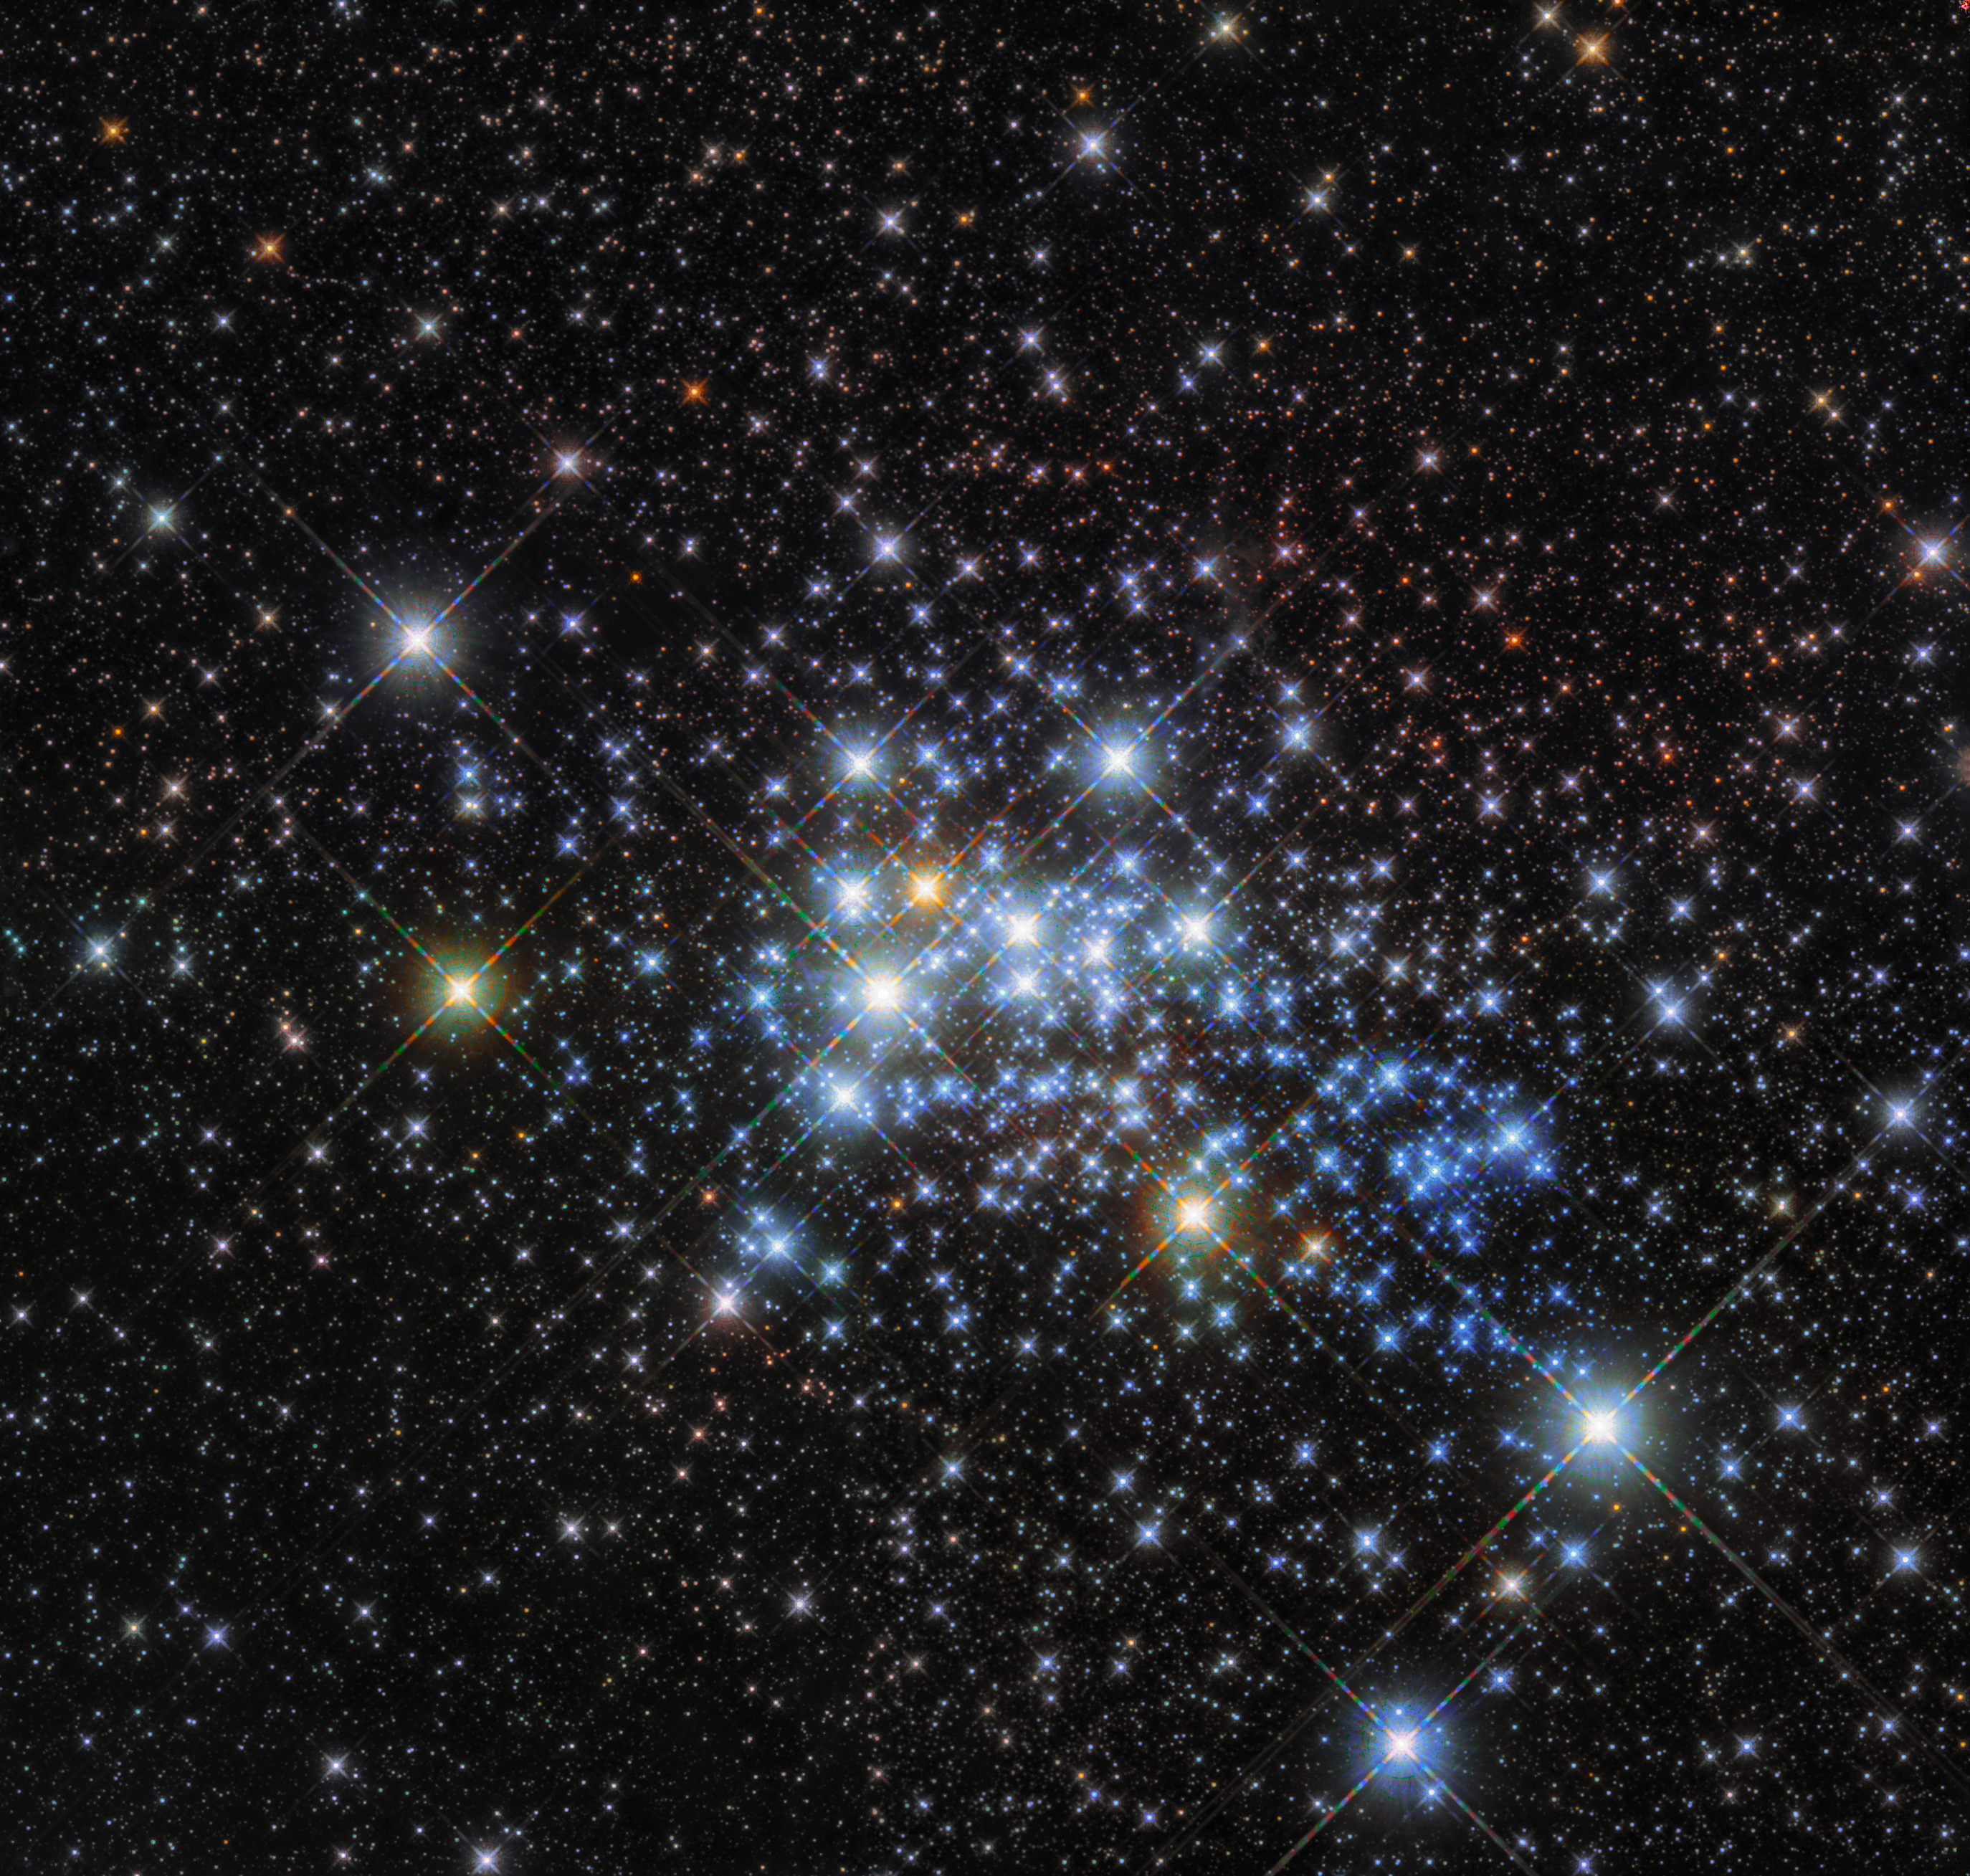

Home to a hypergiant

Light travels through space at just under 300 000 kilometres per second! This staggering speed is used to calculate astronomical distances; although often misinterpreted as a unit of time (due to its misleading name), a light-year is actually a unit of astronomical distance, and is defined as the distance that light travels in a year. For reference, this is around nine trillion kilometres… but it’s a little tricky to visualise!

With this in mind, 15 000 light-years may sound like a truly huge distance, but compared to the vastness of the cosmos, it’s really quite nearby. In fact, an object sitting 15 000 light-years away would not even be outside our home galaxy, the Milky Way. This is roughly the distance between us and a young super star cluster known as Westerlund 1, home to one of the largest stars ever discovered.

Stars are classified according to their spectral type, surface temperature, and luminosity. While studying and classifying the cluster’s constituent stars, astronomers discovered that Westerlund 1 is home to one of the largest stars ever discovered, originally named Westerlund 1-26. It is a red supergiant (although sometimes classified as a hypergiant) with a radius over 1500 times that of our Sun. If Westerlund 1-26 were placed where our Sun is in our Solar System, it would extend out beyond the orbit of Jupiter.

Most of Westerlund 1’s stars are thought to have formed in the same burst of activity, meaning that they have similar ages and compositions. The cluster is relatively young in astronomical terms — at around three million years old it is a baby compared to our own Sun, which is some 4.6 billion years old.

Credit: ESA/Hubble & NASA